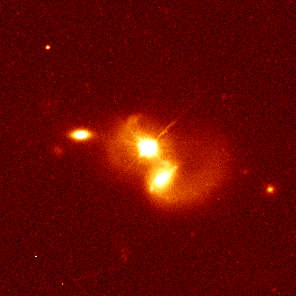

Quasar PG 1012+008

Hubble has captured quasar PG 1012+008, located 1.6 billion light-years from Earth, merging with a bright galaxy (the object just below the quasar).

The two objects are 31, 000 light-years apart, but the swirling wisps of dust and gas surrounding the quasar and galaxy provide strong evidence for an interaction between them.

Credit: John Bahcall (Institute for Advanced Study, Princeton) Mike Disney (University of Wales) and NASA/ESA